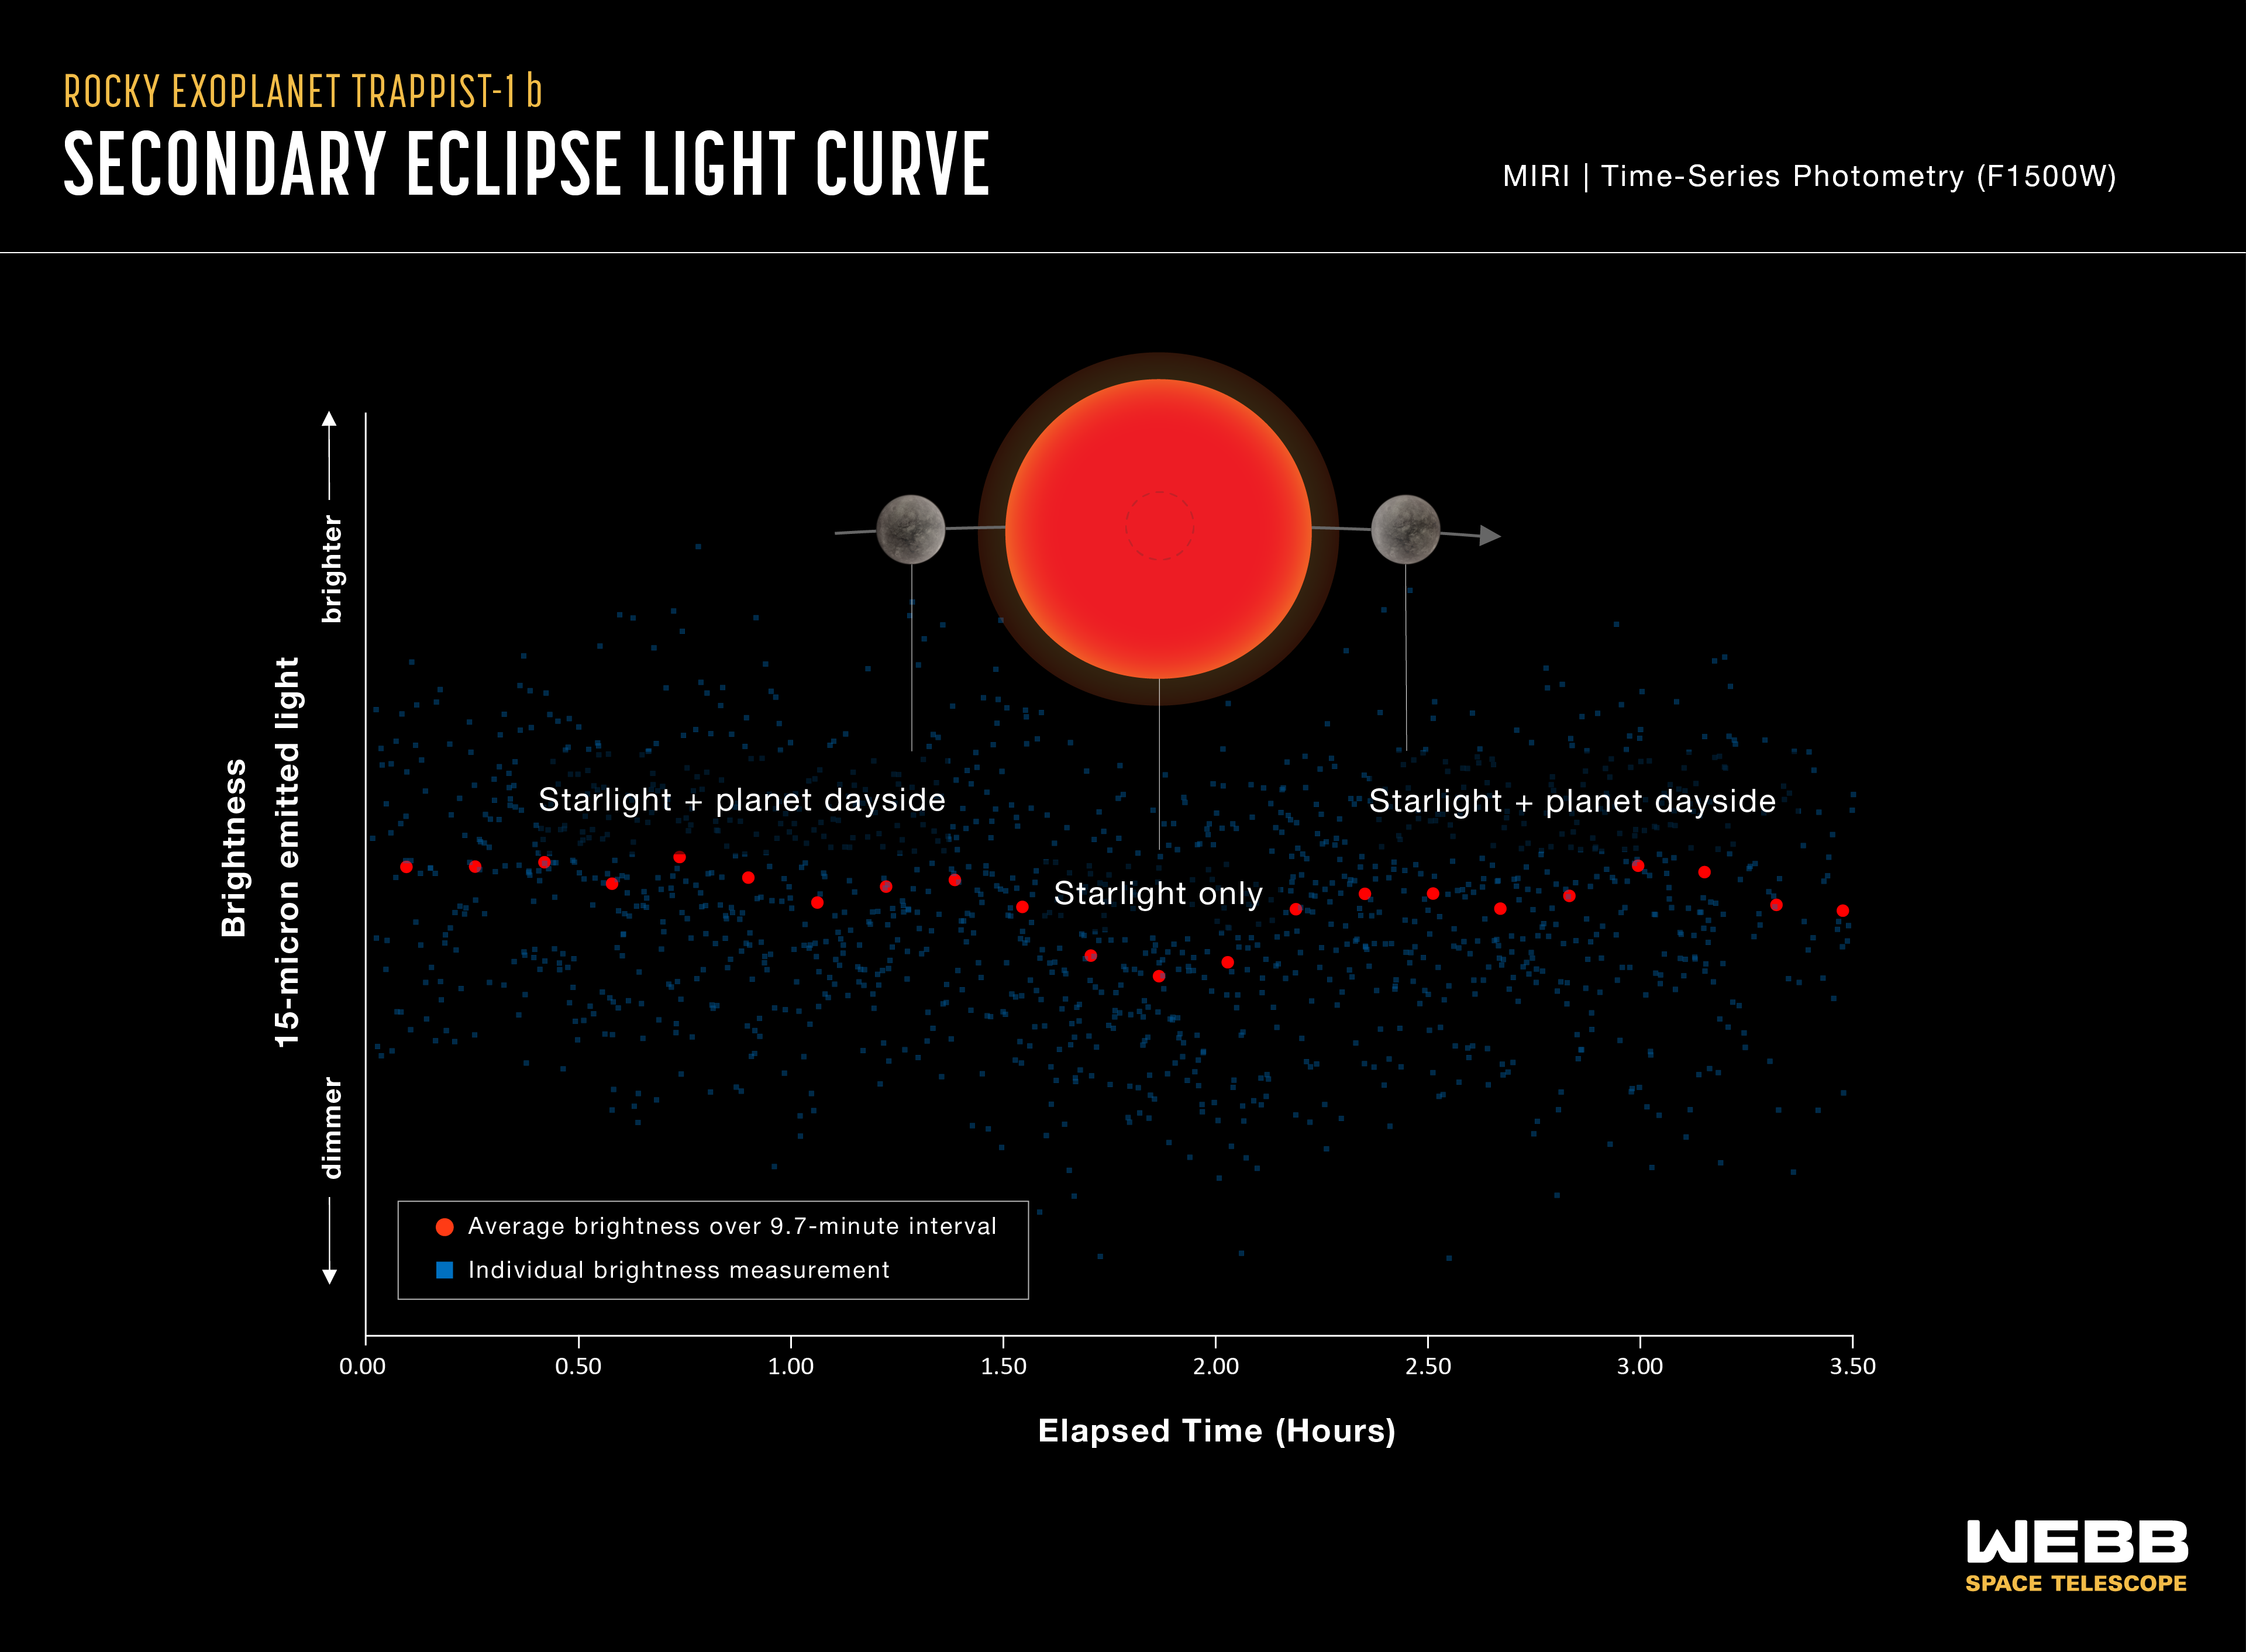

Rocky exoplanet TRAPPIST-1 b (secondary eclipse light curve)

Light curve showing the change in brightness of the TRAPPIST-1 system as the innermost planet, TRAPPIST-1 b, moves behind the star. This phenomenon is known as a secondary eclipse.

Astronomers used Webb’s Mid-Infrared Instrument (MIRI) to measure the brightness of mid-infrared light. When the planet is beside the star, the light emitted by both the star and the dayside of the planet reach the telescope, and the system appears brighter. When the planet is behind the star, the light emitted by the planet is blocked and only the starlight reaches the telescope, causing the apparent brightness to decrease.

Astronomers can subtract the brightness of the star from the combined brightness of the star and planet to calculate how much infrared light is coming from the planet’s dayside. This is then used to calculate the dayside temperature.

The graph shows combined data from five separate observations made using MIRI’s F1500W filter, which only allows light with wavelengths ranging from 13.5-16.6 microns to pass through to the detectors. The blue squares are individual brightness measurements. The red circles show measurements that are “binned,” or averaged to make it easier to see the change over time. The decrease in brightness during the secondary eclipse is less than 0.1%. MIRI was able to detect changes as small as 0.027% (or 1 part in 3700).

This is the first thermal emission observation of TRAPPIST-1 b, or any planet as small as Earth and as cool as the rocky planets in the Solar System.

The observations are being repeated using a 12.8-micron filter in order to confirm the results and narrow down the interpretations.

MIRI was developed as a partnership between Europe and the USA: the main partners are ESA, a consortium of nationally funded European institutes, the Jet Propulsion Laboratory (JPL) and the University of Arizona. The instrument was nationally funded by the European Consortium under the auspices of the European Space Agency.

Credit: NASA, ESA, CSA, J. Olmsted (STScI), T. P. Greene (NASA Ames), T. Bell (BAERI), E. Ducrot (CEA), P. Lagage (CEA)